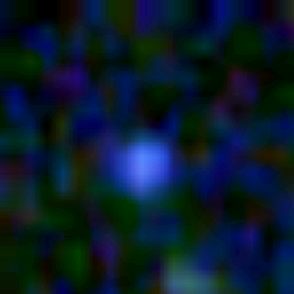

Galaxy building blocks

This is one Proto Galaxy out of a series of 18, taken by the Wide Field Planetary Camera 2.

Credit: Rogier Windhorst and Sam Pascarelle (Arizona State University) and NASA/ESA